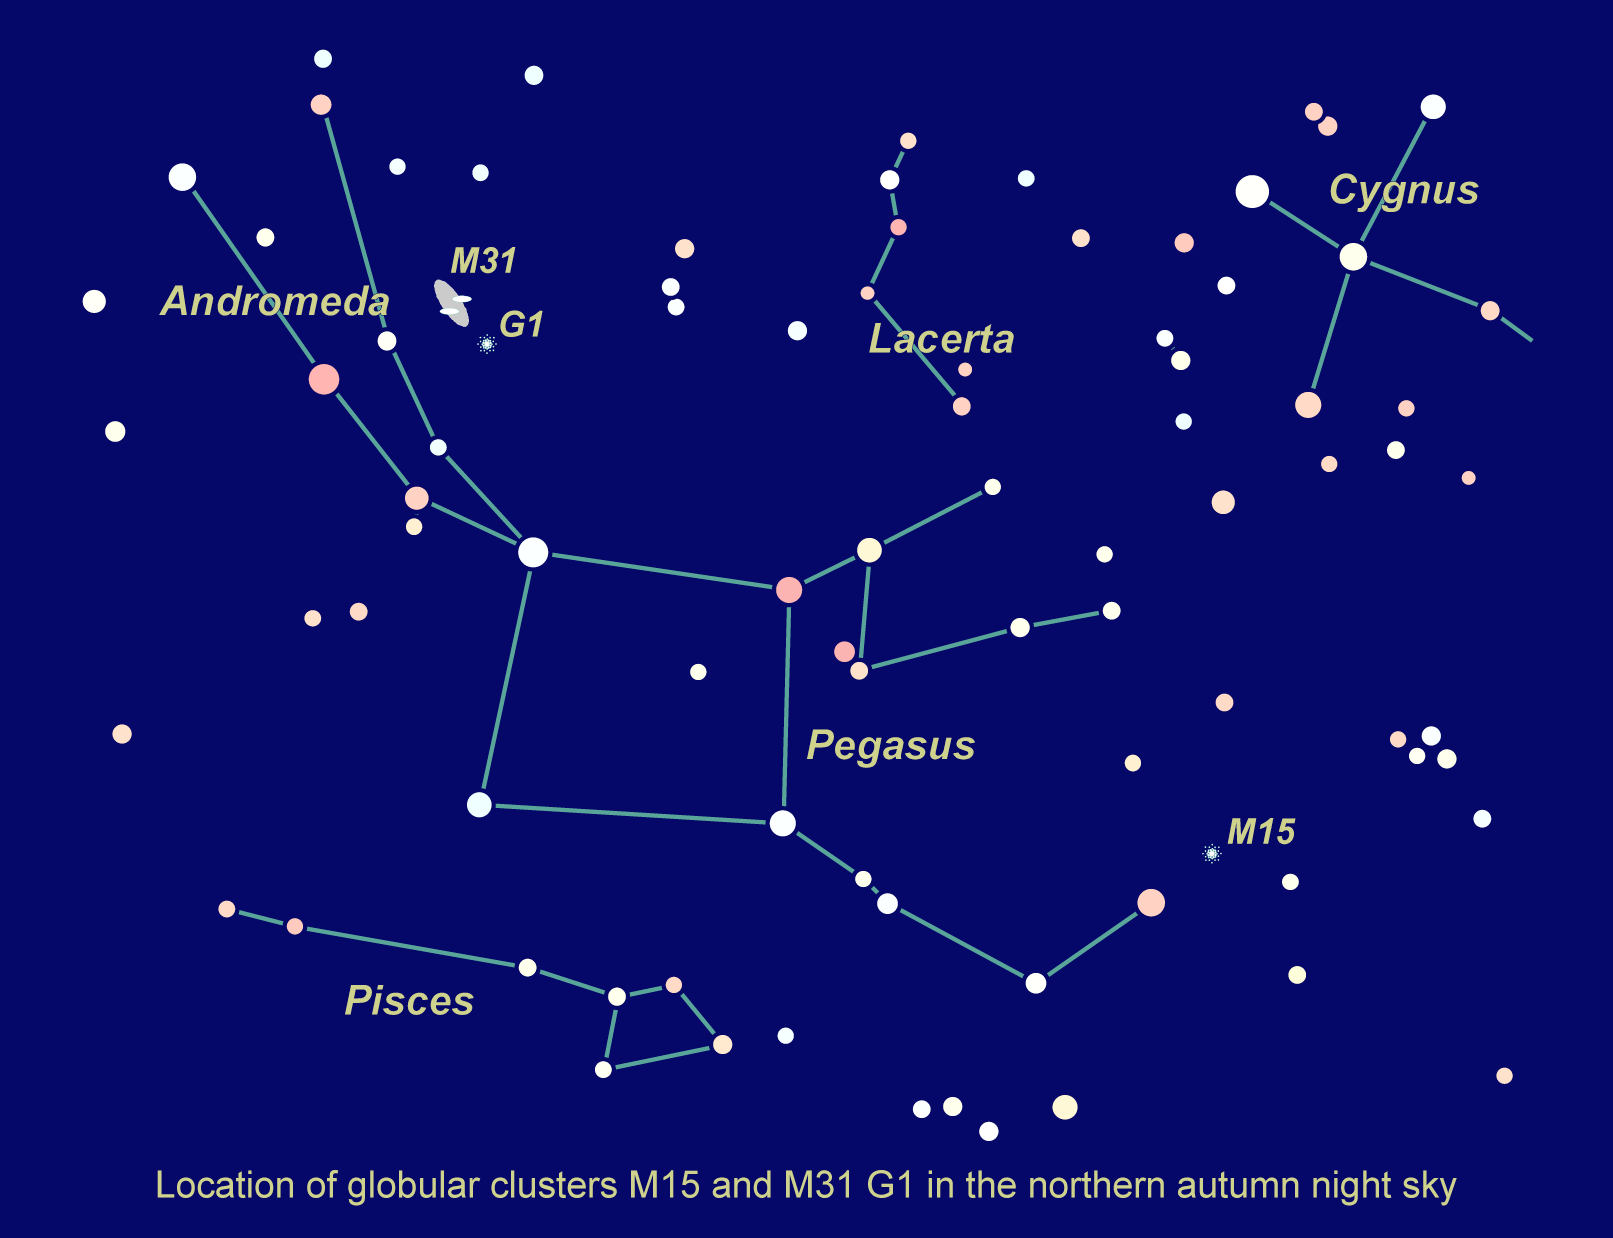

Location of M15 and M31 G1 in the northern autumn sky

Astronomers uncovered one of the black holes in the center of the globular star cluster M15, 32,000 light-years away in the constellation Pegasus. The black hole is 4,000 times more massive than our Sun. A 20,000-solar-mass black hole was found in the giant globular cluster G1, located 2.2 million light-years away in the neighboring Andromeda galaxy.

Credit: NASA/ESA and Z. Levay (STScI)